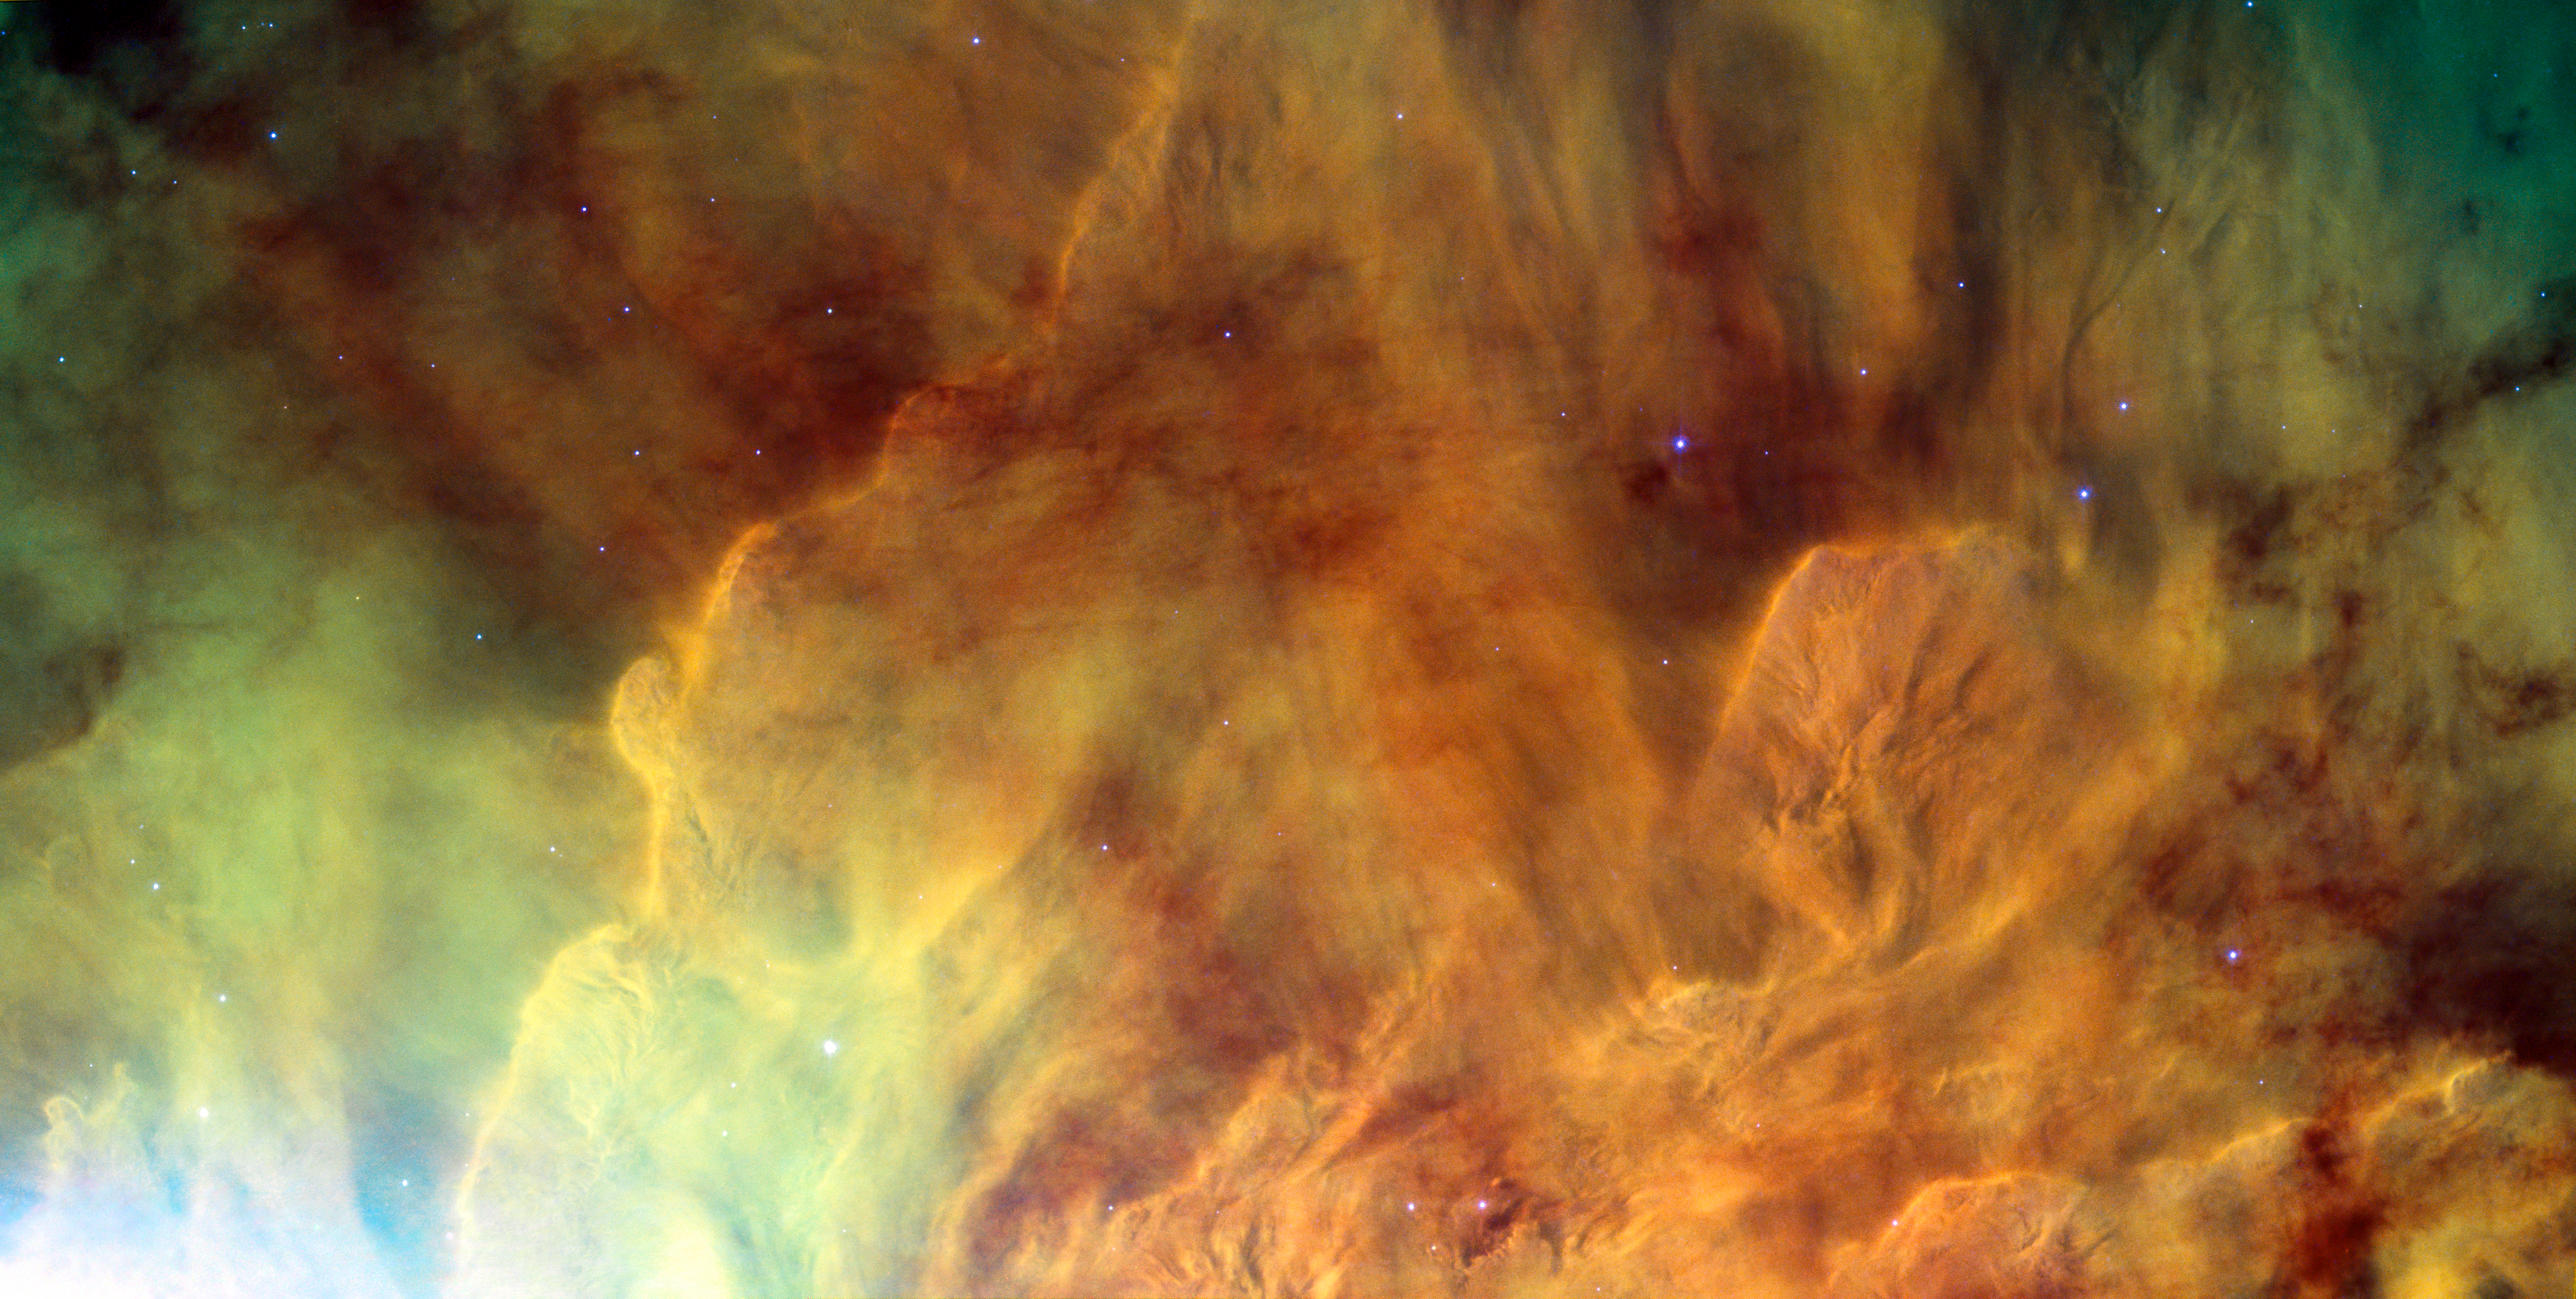

The metamorphosis of Messier 8

Like a Dali masterpiece, this image of Messier 8 from the NASA/ESA Hubble Space Telescope is both intensely colourful and distinctly surreal. Located in the constellation of Sagittarius (The Archer), this giant cloud of glowing interstellar gas is a stellar nursery that is also known as the Lagoon Nebula.

Although the name definitely suits the beauty of this object, “lagoon” does suggest tranquillity and there is nothing placid about the high-energy radiation causing these intricate clouds to glow. The massive stars hiding within the heart of the nebula give off enormous amounts of ultraviolet radiation, ionising the gas and causing it to shine colourfully, as well as sculpting the surrounding nebula into strange shapes. The result is an object around four to five thousand light-years away which, on a clear night, is faintly visible to the naked eye.

Since it was first recorded back in the 1747 this object has been photographed and analysed at many different wavelengths. By using infrared detectors it is possible to delve into the centre of these dusty regions to study the objects within. However, while this optical image, taken with the Advanced Camera for Surveys (ACS) on the Hubble Space Telescope, cannot pierce the obscuring matter it is undoubtedly one of the most visually impressive.

Messier 8 is an enormous structure — around 140 by 60 light-years in extent — to put this in perspective the orbit of Neptune stretches only about four light-hours from our own Sun. This image depicts a small region in the centre of the nebula, while the region adjacent to the Lagoon Nebula, from the same Hubble observations, can be seen here.

This picture was created from exposures taken with the Wide Field Channel of the Advanced Camera for Surveys on Hubble. Light from glowing hydrogen (through the F658N filter) is coloured red. Light from ionised nitrogen (through the F660N filter) is coloured green and light through a yellow filter (F550M) is coloured blue. The exposure times through each filter are 1560 s, 1600 s and 400 s respectively. The blue-white flare at the lower left of the image is scattered light from a bright star just outside the field of view. The field of view is about 3.3 by 1.7 arcminutes.

Credit: ESA/Hubble & NASA